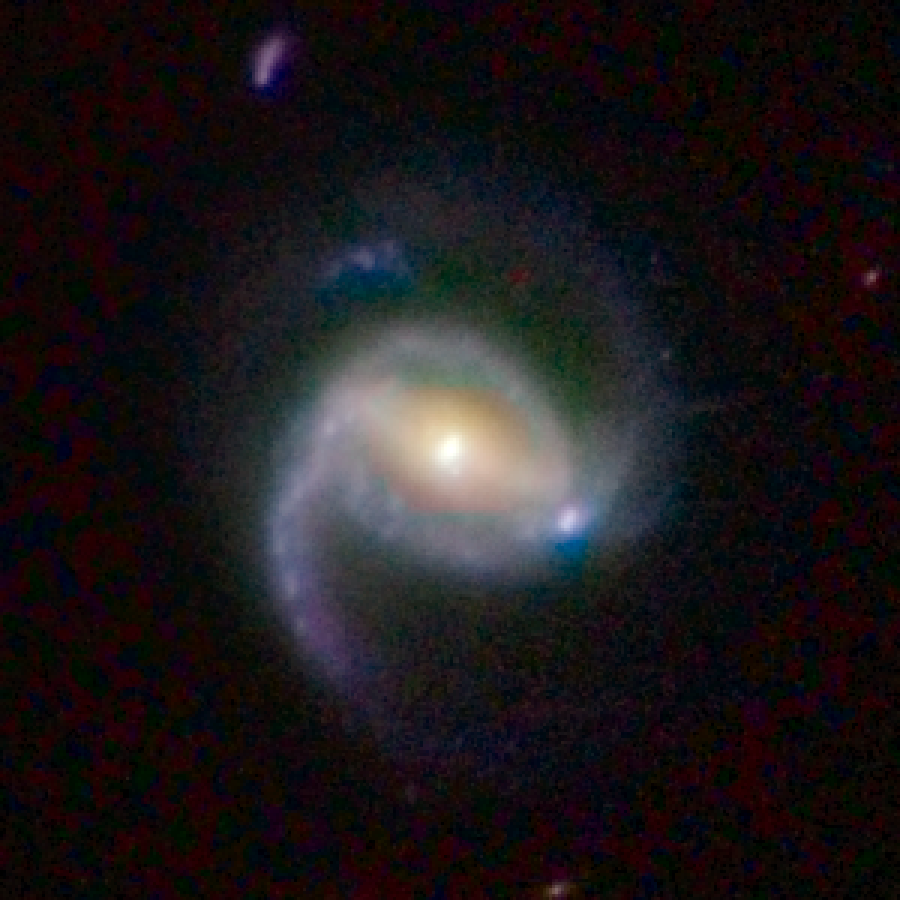

COSMOS Barred Spiral Galaxy 3127341

Barred spiral galaxy 3127341 is located 2.1 billion light-years away from Earth. The galaxy is part of a landmark study of more than 2,000 spiral galaxies from the largest galaxy census conducted by the Advanced Camera for Surveys aboard the NASA/ESA Hubble Space Telescope. The observations are part of the Cosmic Evolution Survey (COSMOS). Astronomers assembled this image from observations taken between fall 2003 and spring 2005 with Hubble and the Subaru Telescope in Mauna Kea, Hawaii.

Credit: NASA, ESA, K. Sheth (Spitzer Science Center, California Institute of Technology, Pasadena, California), and P. Capak and N. Scoville (California Institute of Technology)